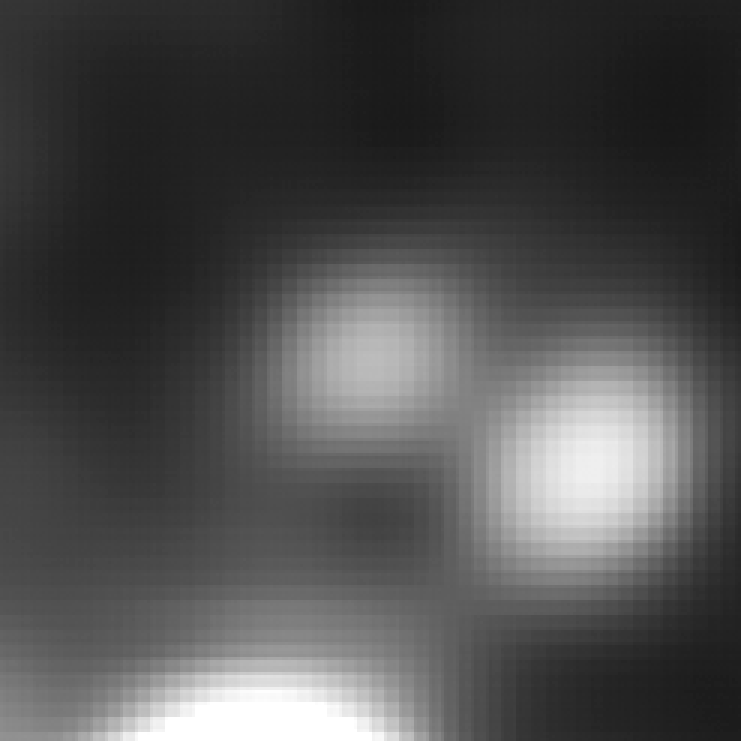

Arc in infrared light (Spitzer)

The distant galaxy, dubbed A1689-zD1, appears as a whitish blob in the Spitzer IRAC close-up view. The galaxy is brimming with star birth. Hubble and Spitzer worked together to show that it is one of the youngest and likely the most distant galaxies ever discovered. Astronomers estimate that the galaxy is 13 billion light-years away. Abell 1689 is 2.2 billion light-years away.

Credit: NASA; ESA; L. Bradley (Johns Hopkins University); R. Bouwens (University of California, Santa Cruz); H. Ford (Johns Hopkins University); and G. Illingworth (University of California, Santa Cruz)